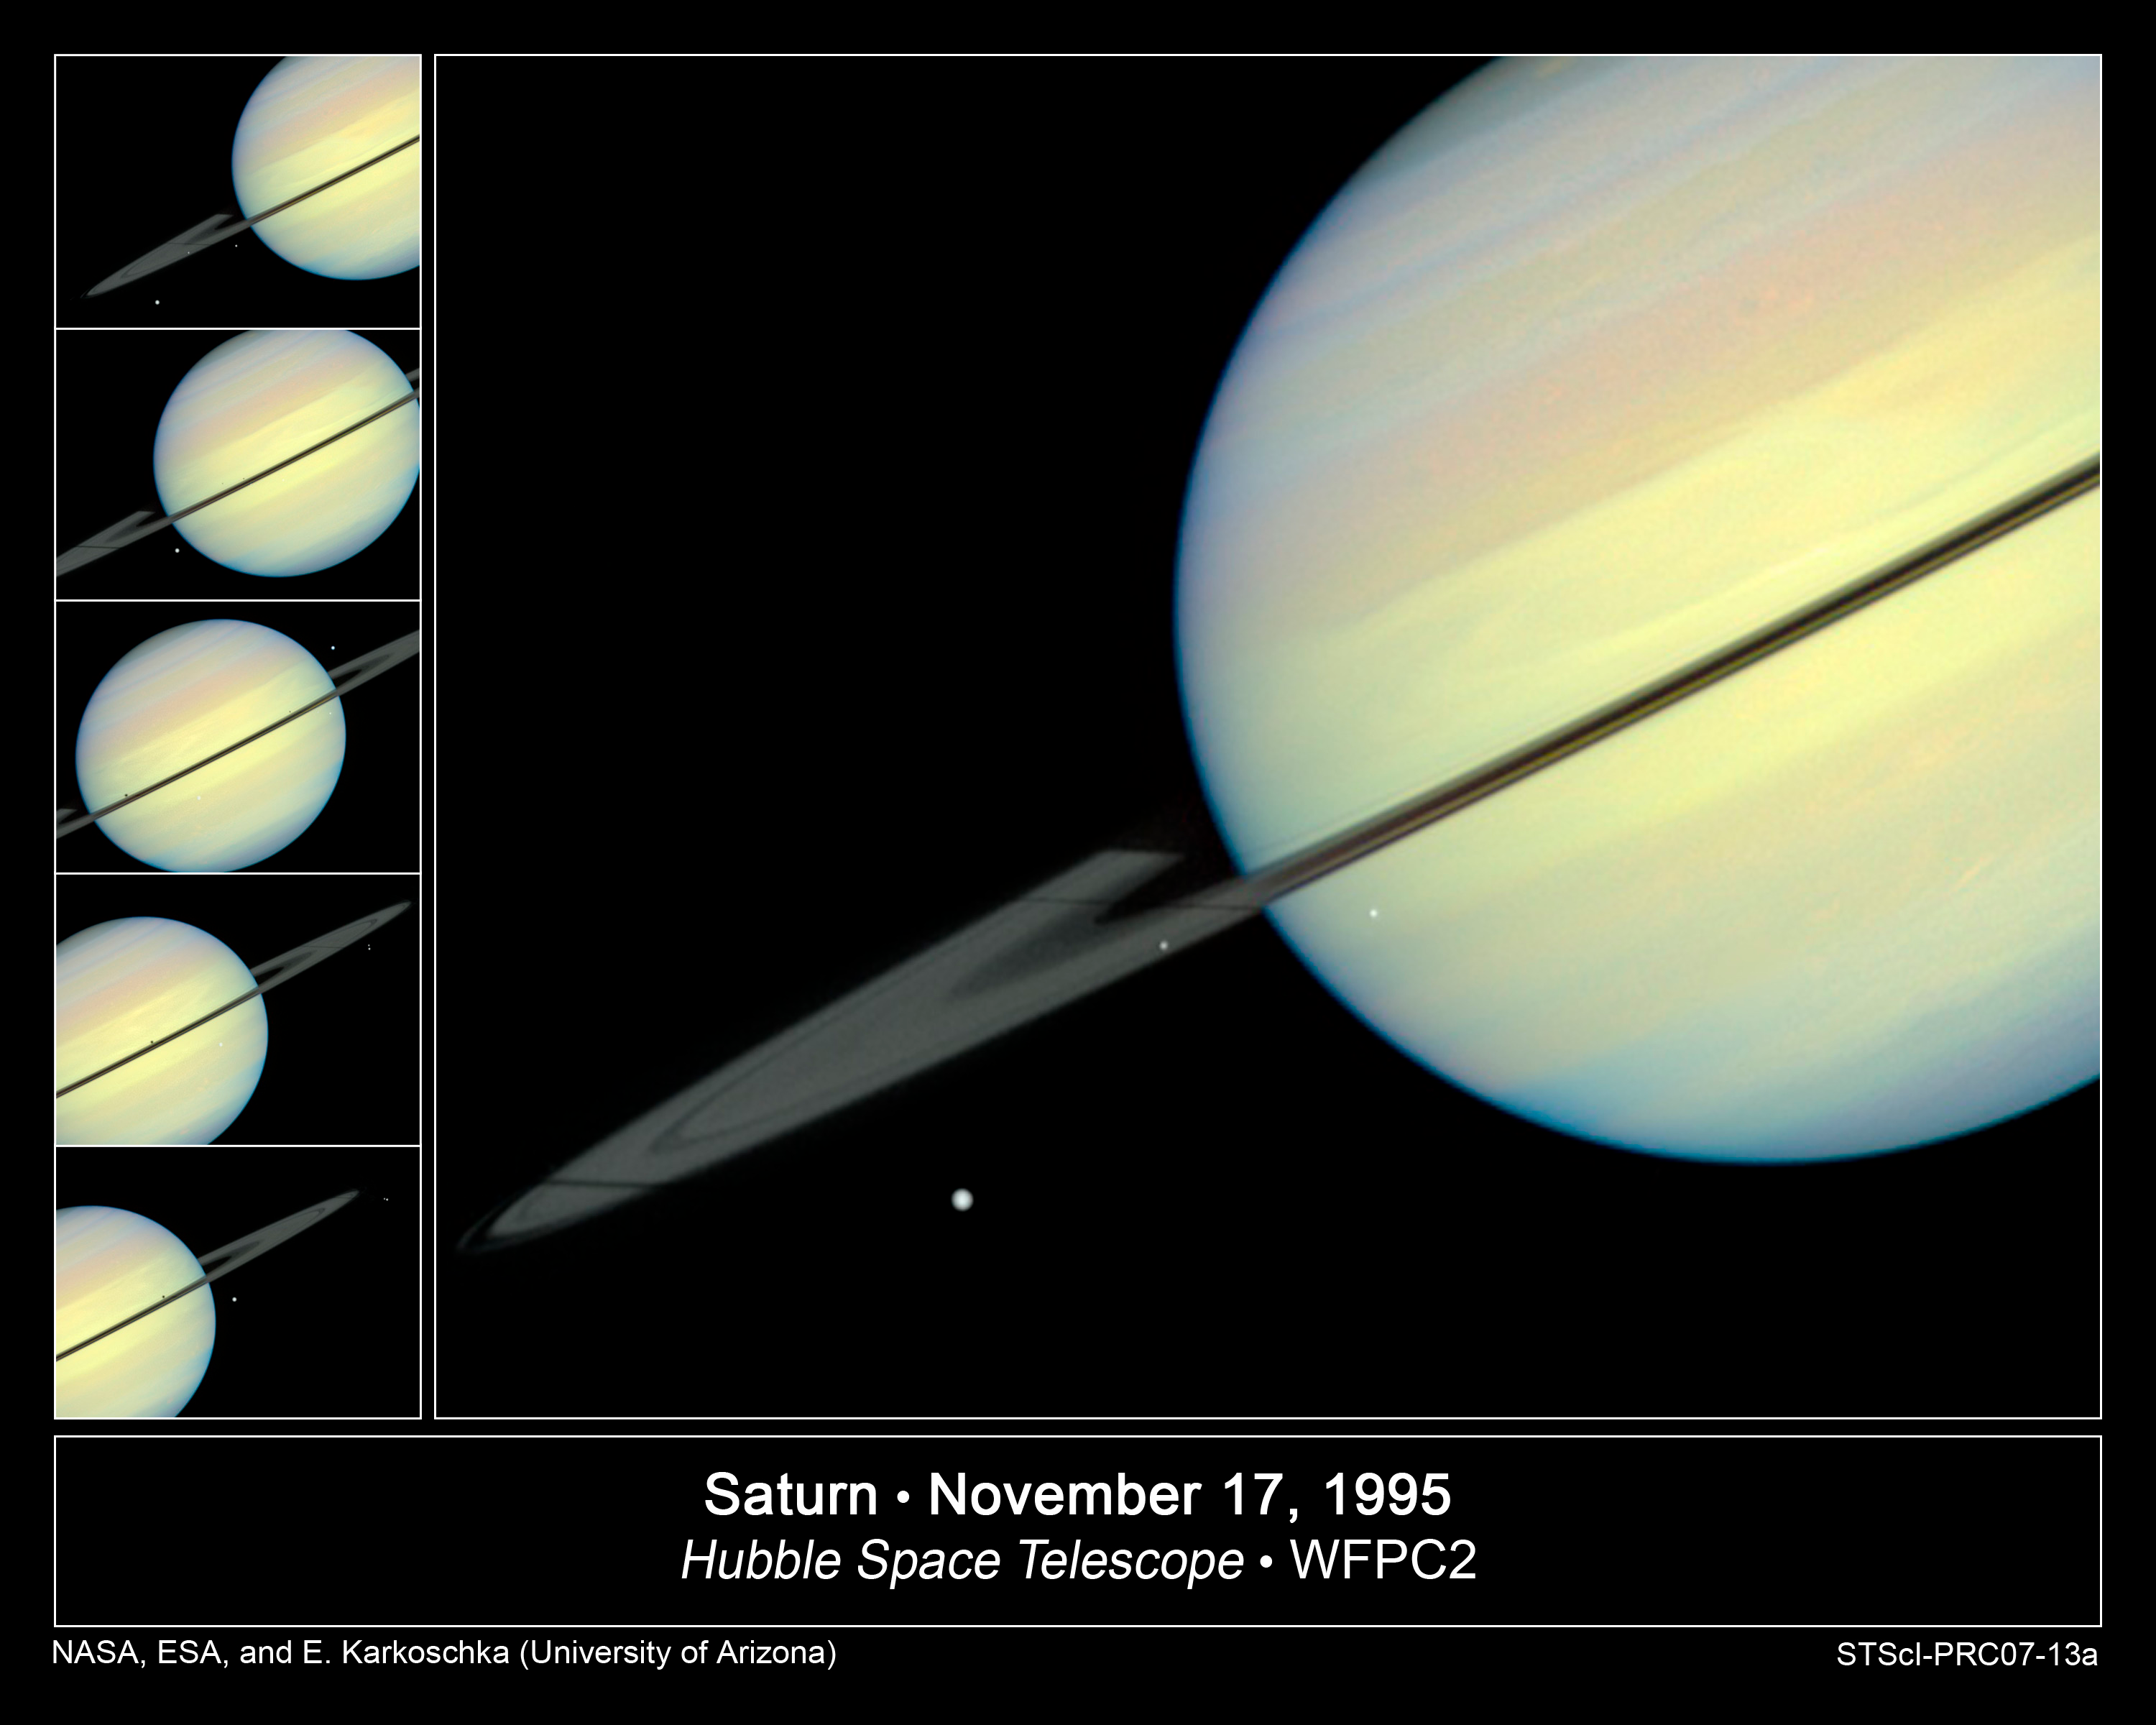

Hubble Sees Moons Racing Across Saturn

This movie still captures the moons Mimas, Enceladus, and Dione as they begin their race across Saturn's disk. The still is from a movie created from images taken by NASA/ESA Hubble Space Telescope. It reveals the planet's rings tilted nearly edge-on toward the Sun, an event that occurs once every 15 years. Because of this special alignment, the moons cast shadows on the planet and its rings. Dione is on the far left of the image, Mimas is in the middle, and Enceladus is on the right. Dione and Enceladus are casting long shadows on the rings.

Credit: NASA/ESA and E. Karkoschka (University of Arizona)